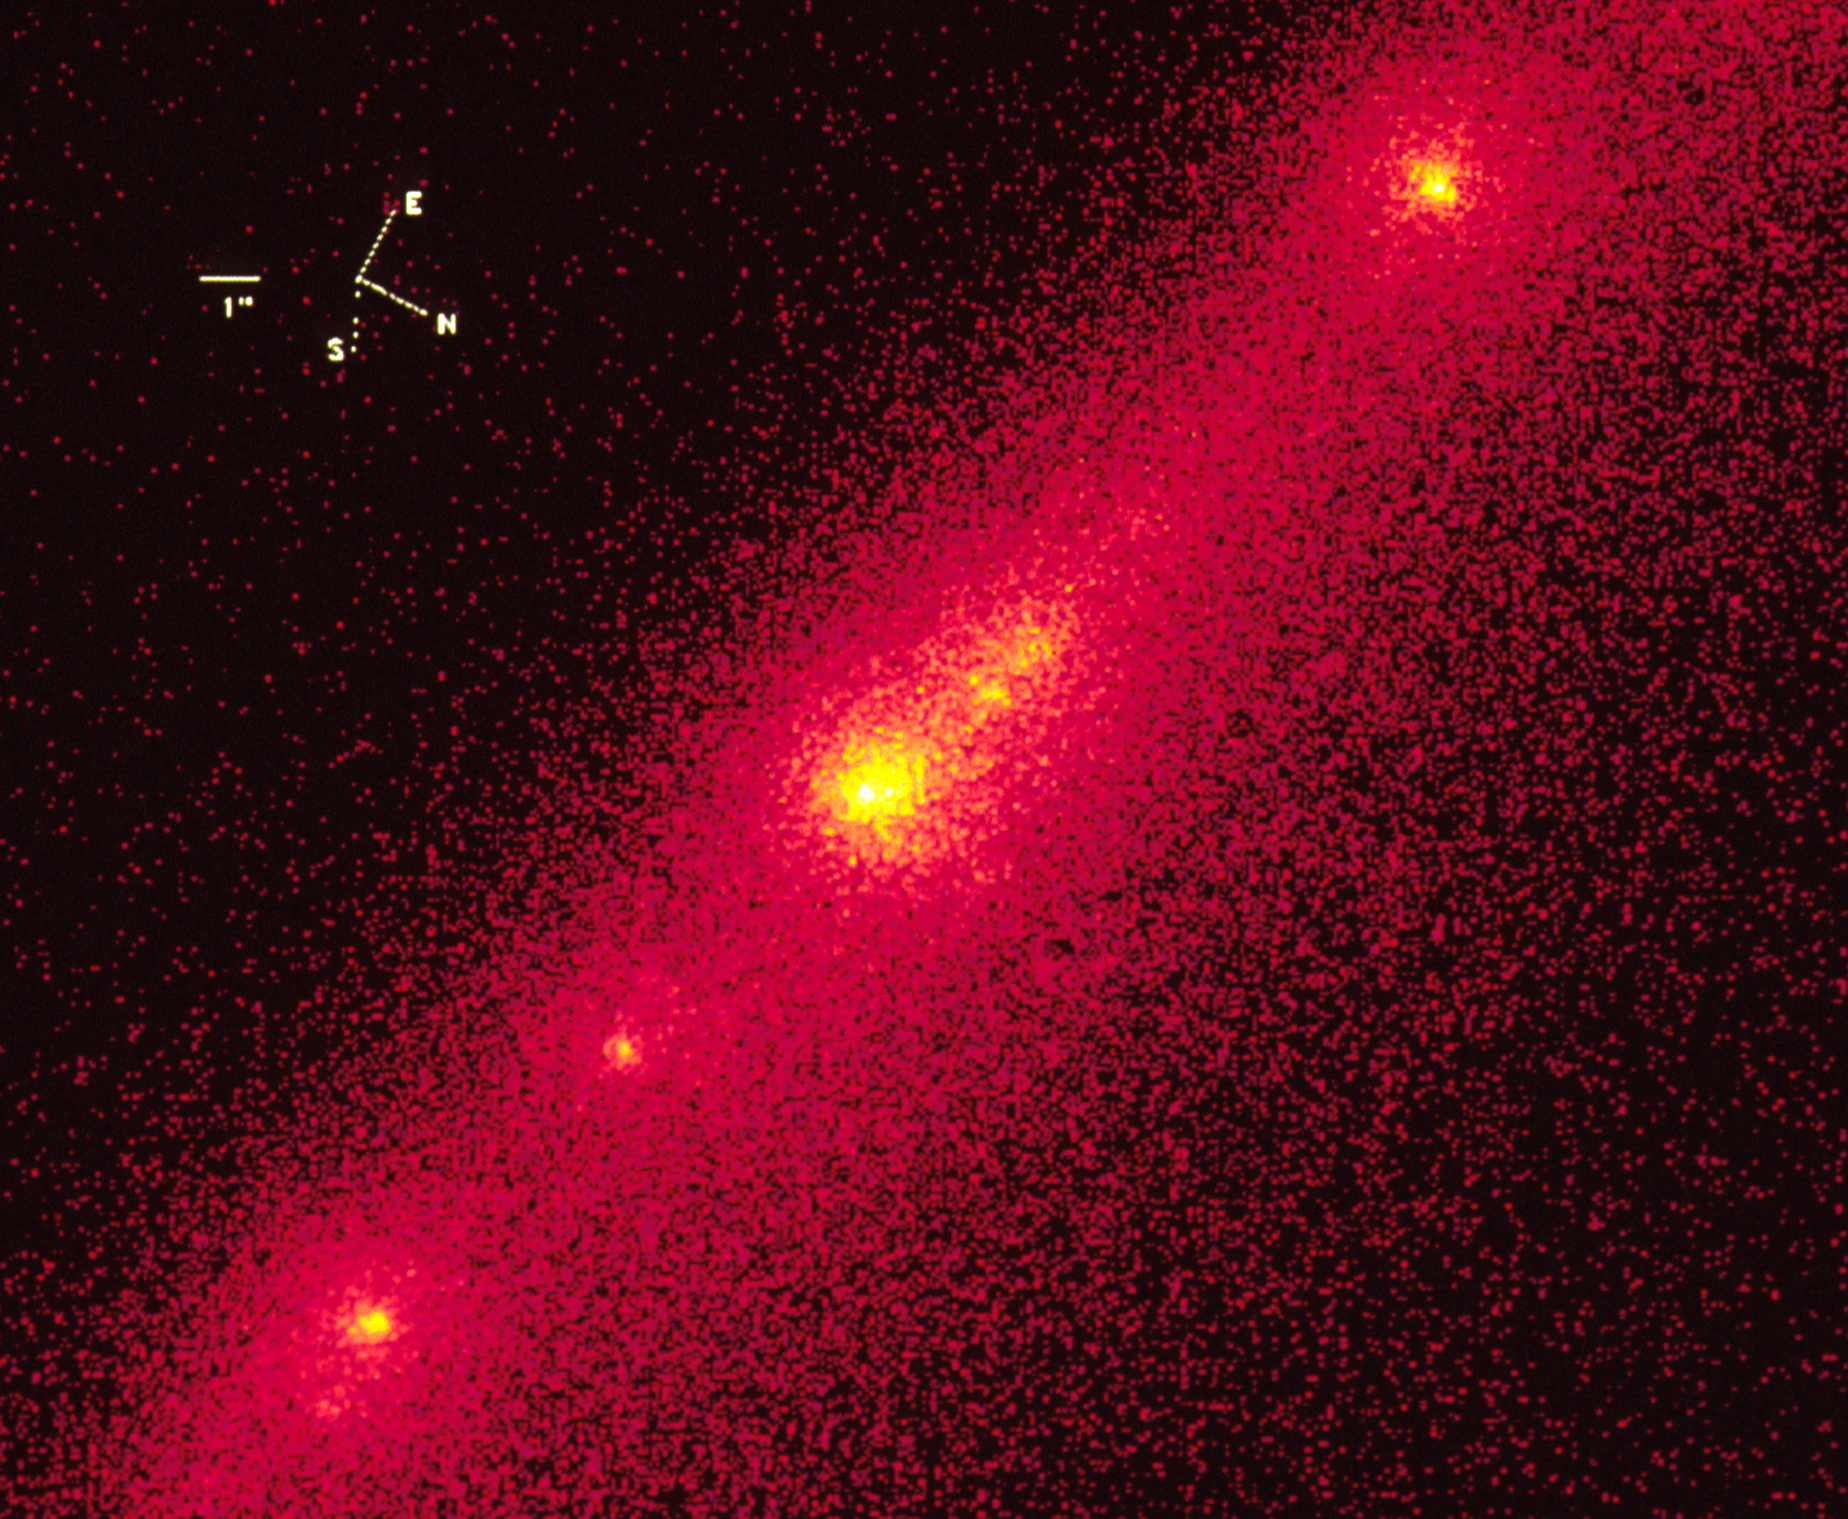

Hubble Close-Up of Bright Nucleus in Comet P/Shoemaker-Levy 9

This is an enlargement of a NASA/ESA Hubble Space Telescope image of the "brightest nucleus" in a string of approximately 20 objects that comprise comet P/Shoemaker-Levy 9. The comet is hurtling toward a July I994 collision with the giant planet Jupiter.

Hubble's high resolution shows that this bright region is actually a group of at least four separate pieces. The HST images allow for the best separation of the individual nuclei and their surrounding halo of dust (comae), which results in a better estimate of the nuclear sizes.

Credit: Dr. H. A. Weaver and Mr. T. E. Smith, STScI NASA/ESA